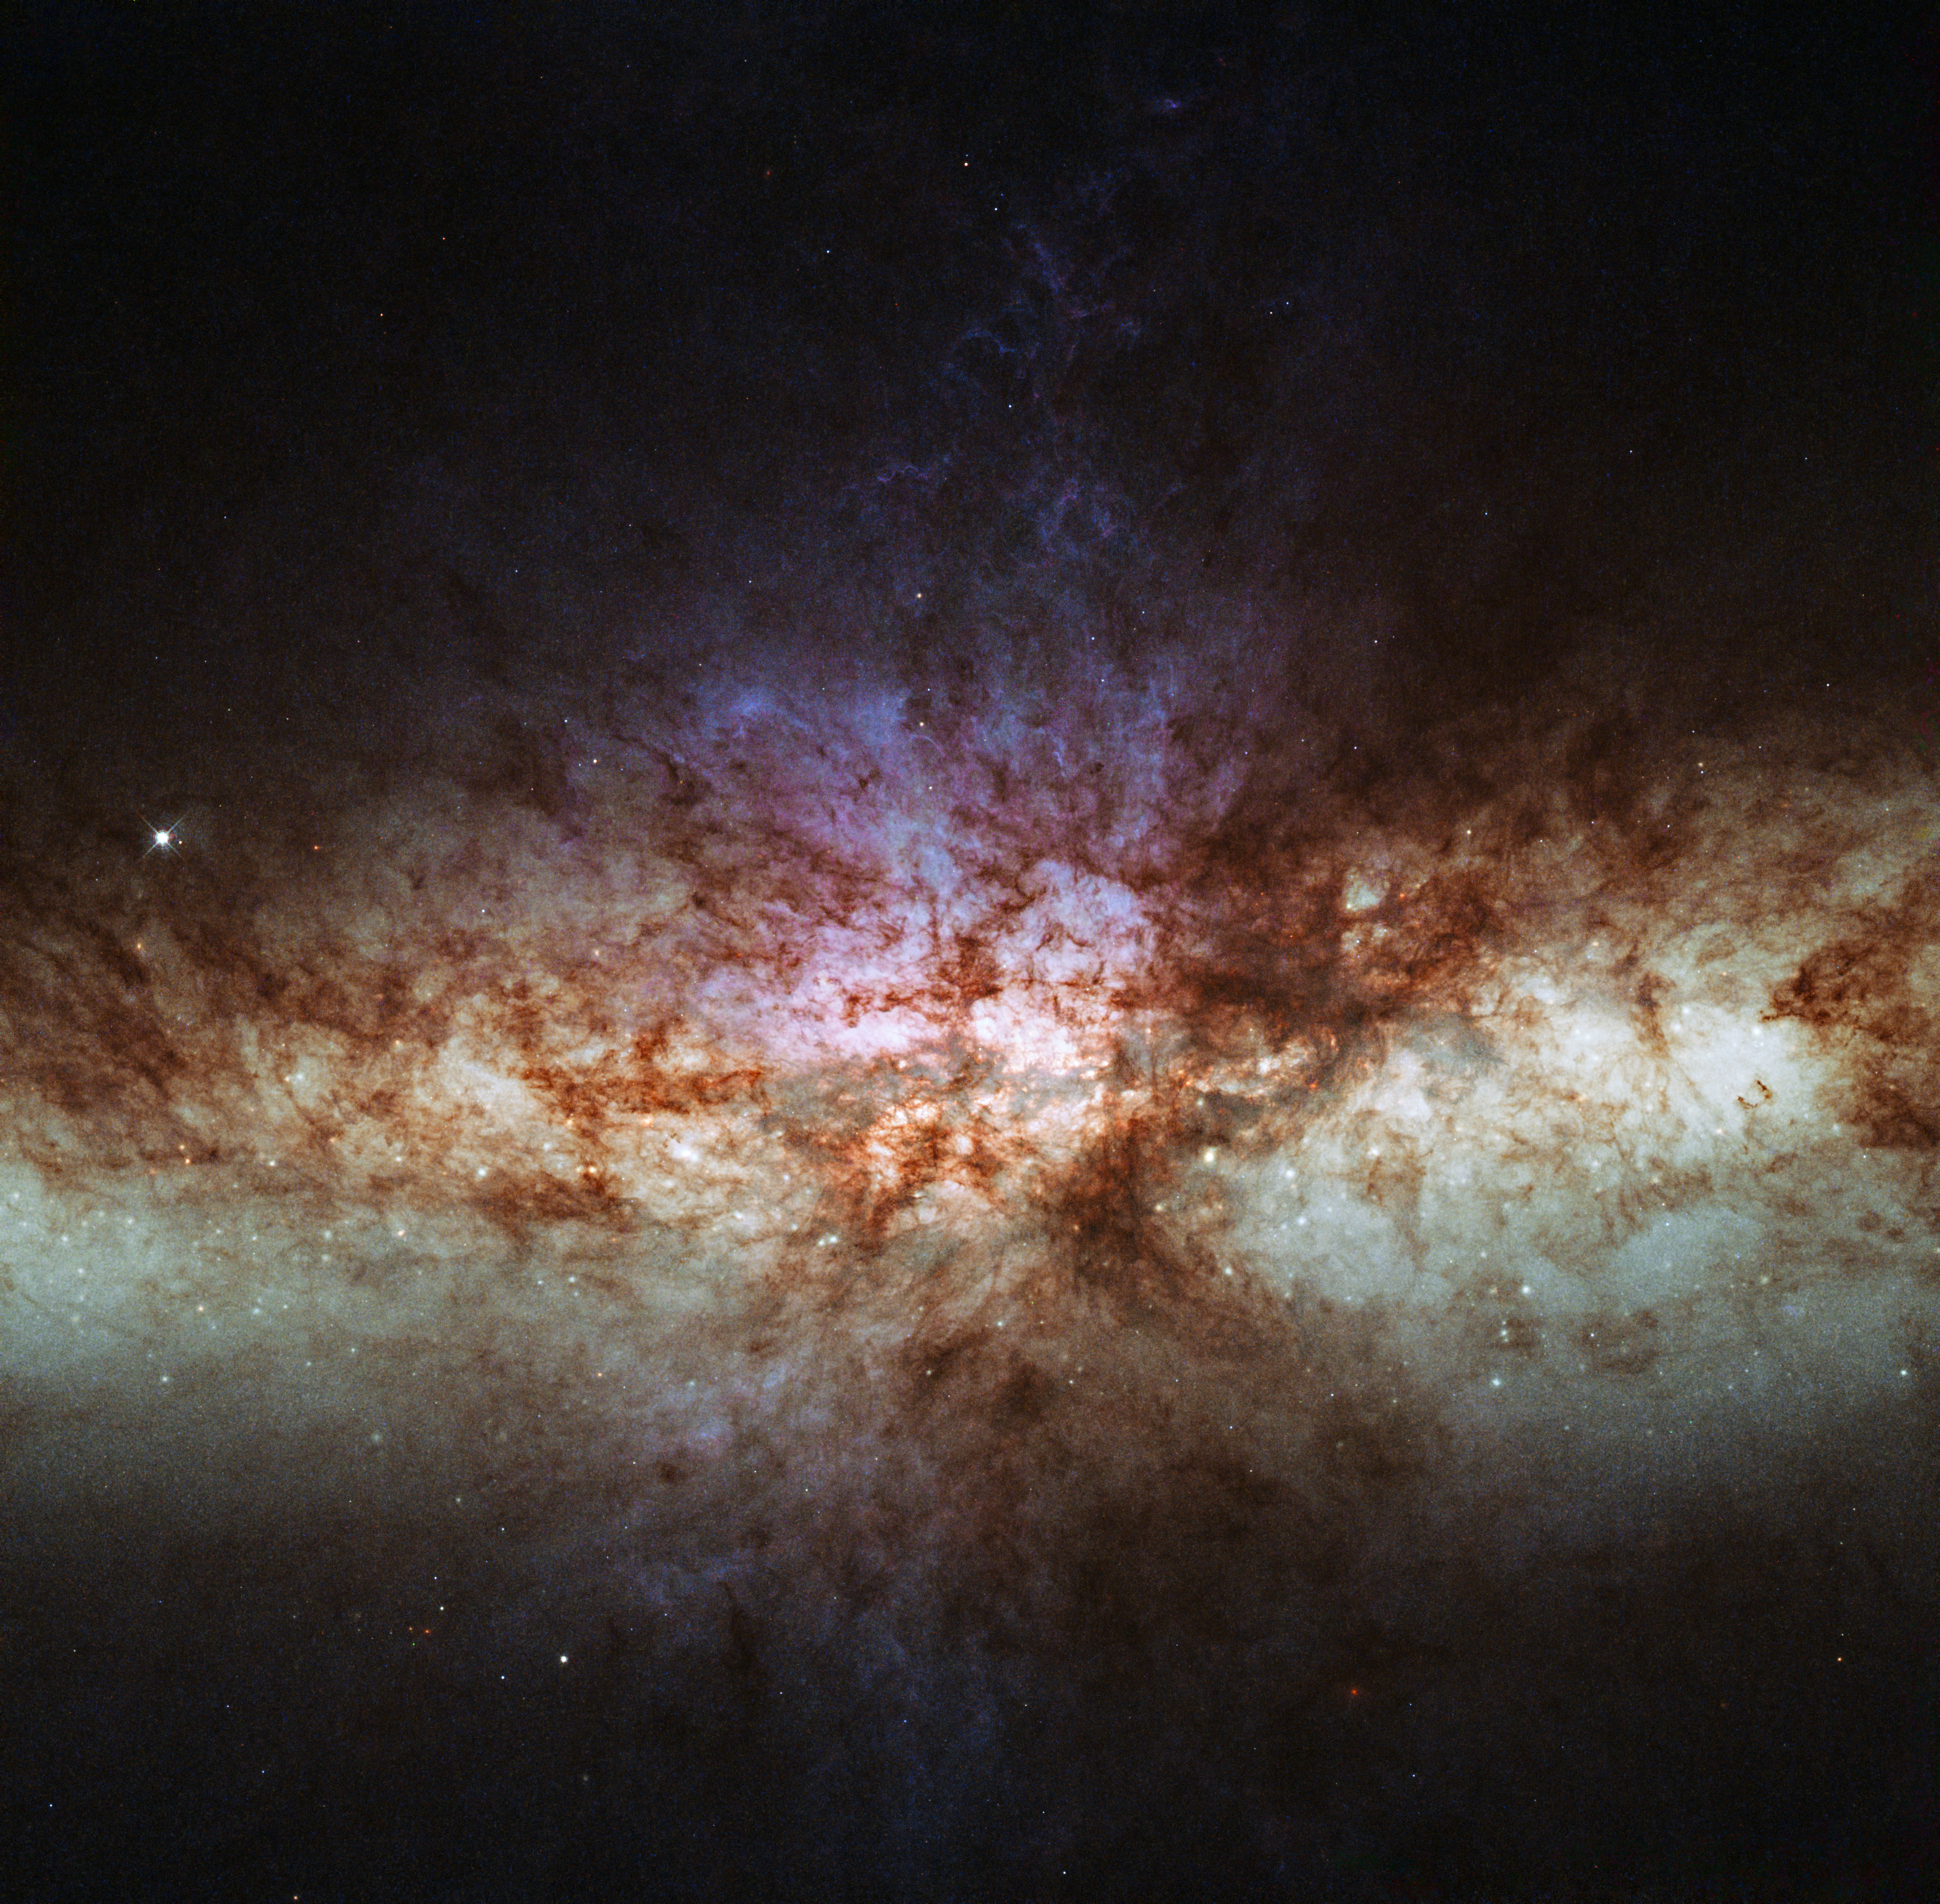

Smoke without fire: a different view of the cigar galaxy

This image shows the most detailed view ever of the core of Messier 82 (M 82), also known as the Cigar Galaxy. Rich with dust, young stars and glowing gas, M 82 is both unusually bright and relatively close to Earth. The starburst galaxy is located around 12 million light-years away in the constellation of Ursa Major (The Great Bear).

This is not the first time Hubble has imaged the Cigar Galaxy. Previous images (for example heic0604) show a galaxy ablaze with stars. Yet this image looks quite unlike them, and is dominated instead by glowing gas and dust, with the stars almost invisible. Why such a difference?

The new image is more detailed than previous Hubble observations – in fact, it is the most detailed image ever made of this galaxy. But the reason it looks so dramatically different is down to the choices astronomers make when designing their observations. Hubble’s cameras do not see in colour: they are sensitive to a broad range of wavelengths which they image only in greyscale. Colour pictures can be constructed by passing the light through different coloured filters and combining the resulting images, but the choice of filters makes a big difference to the end result.

Using filters which allow through relatively broad bands of colours, similar to those our eyes see, results in natural-looking colours and bright stars, as starlight shines brightly across the spectrum.

Using filters transparent only to the wavelengths emitted by specific chemical elements, as in this image, isolates the light from glowing gas clouds, while blocking out much of the starlight. This explains why the stars appear faint in this image, and why the dust lanes are sharply silhouetted against the brightly glowing gas clouds.

The image shows the light emitted by sulphur (shown in red), visible and ultraviolet light from oxygen (shown green and blue, respectively), and light from hydrogen (cyan).

The field of view is approximately 2.7 by 2.7 arcminutes.

Credit: ESA/Hubble & NASA